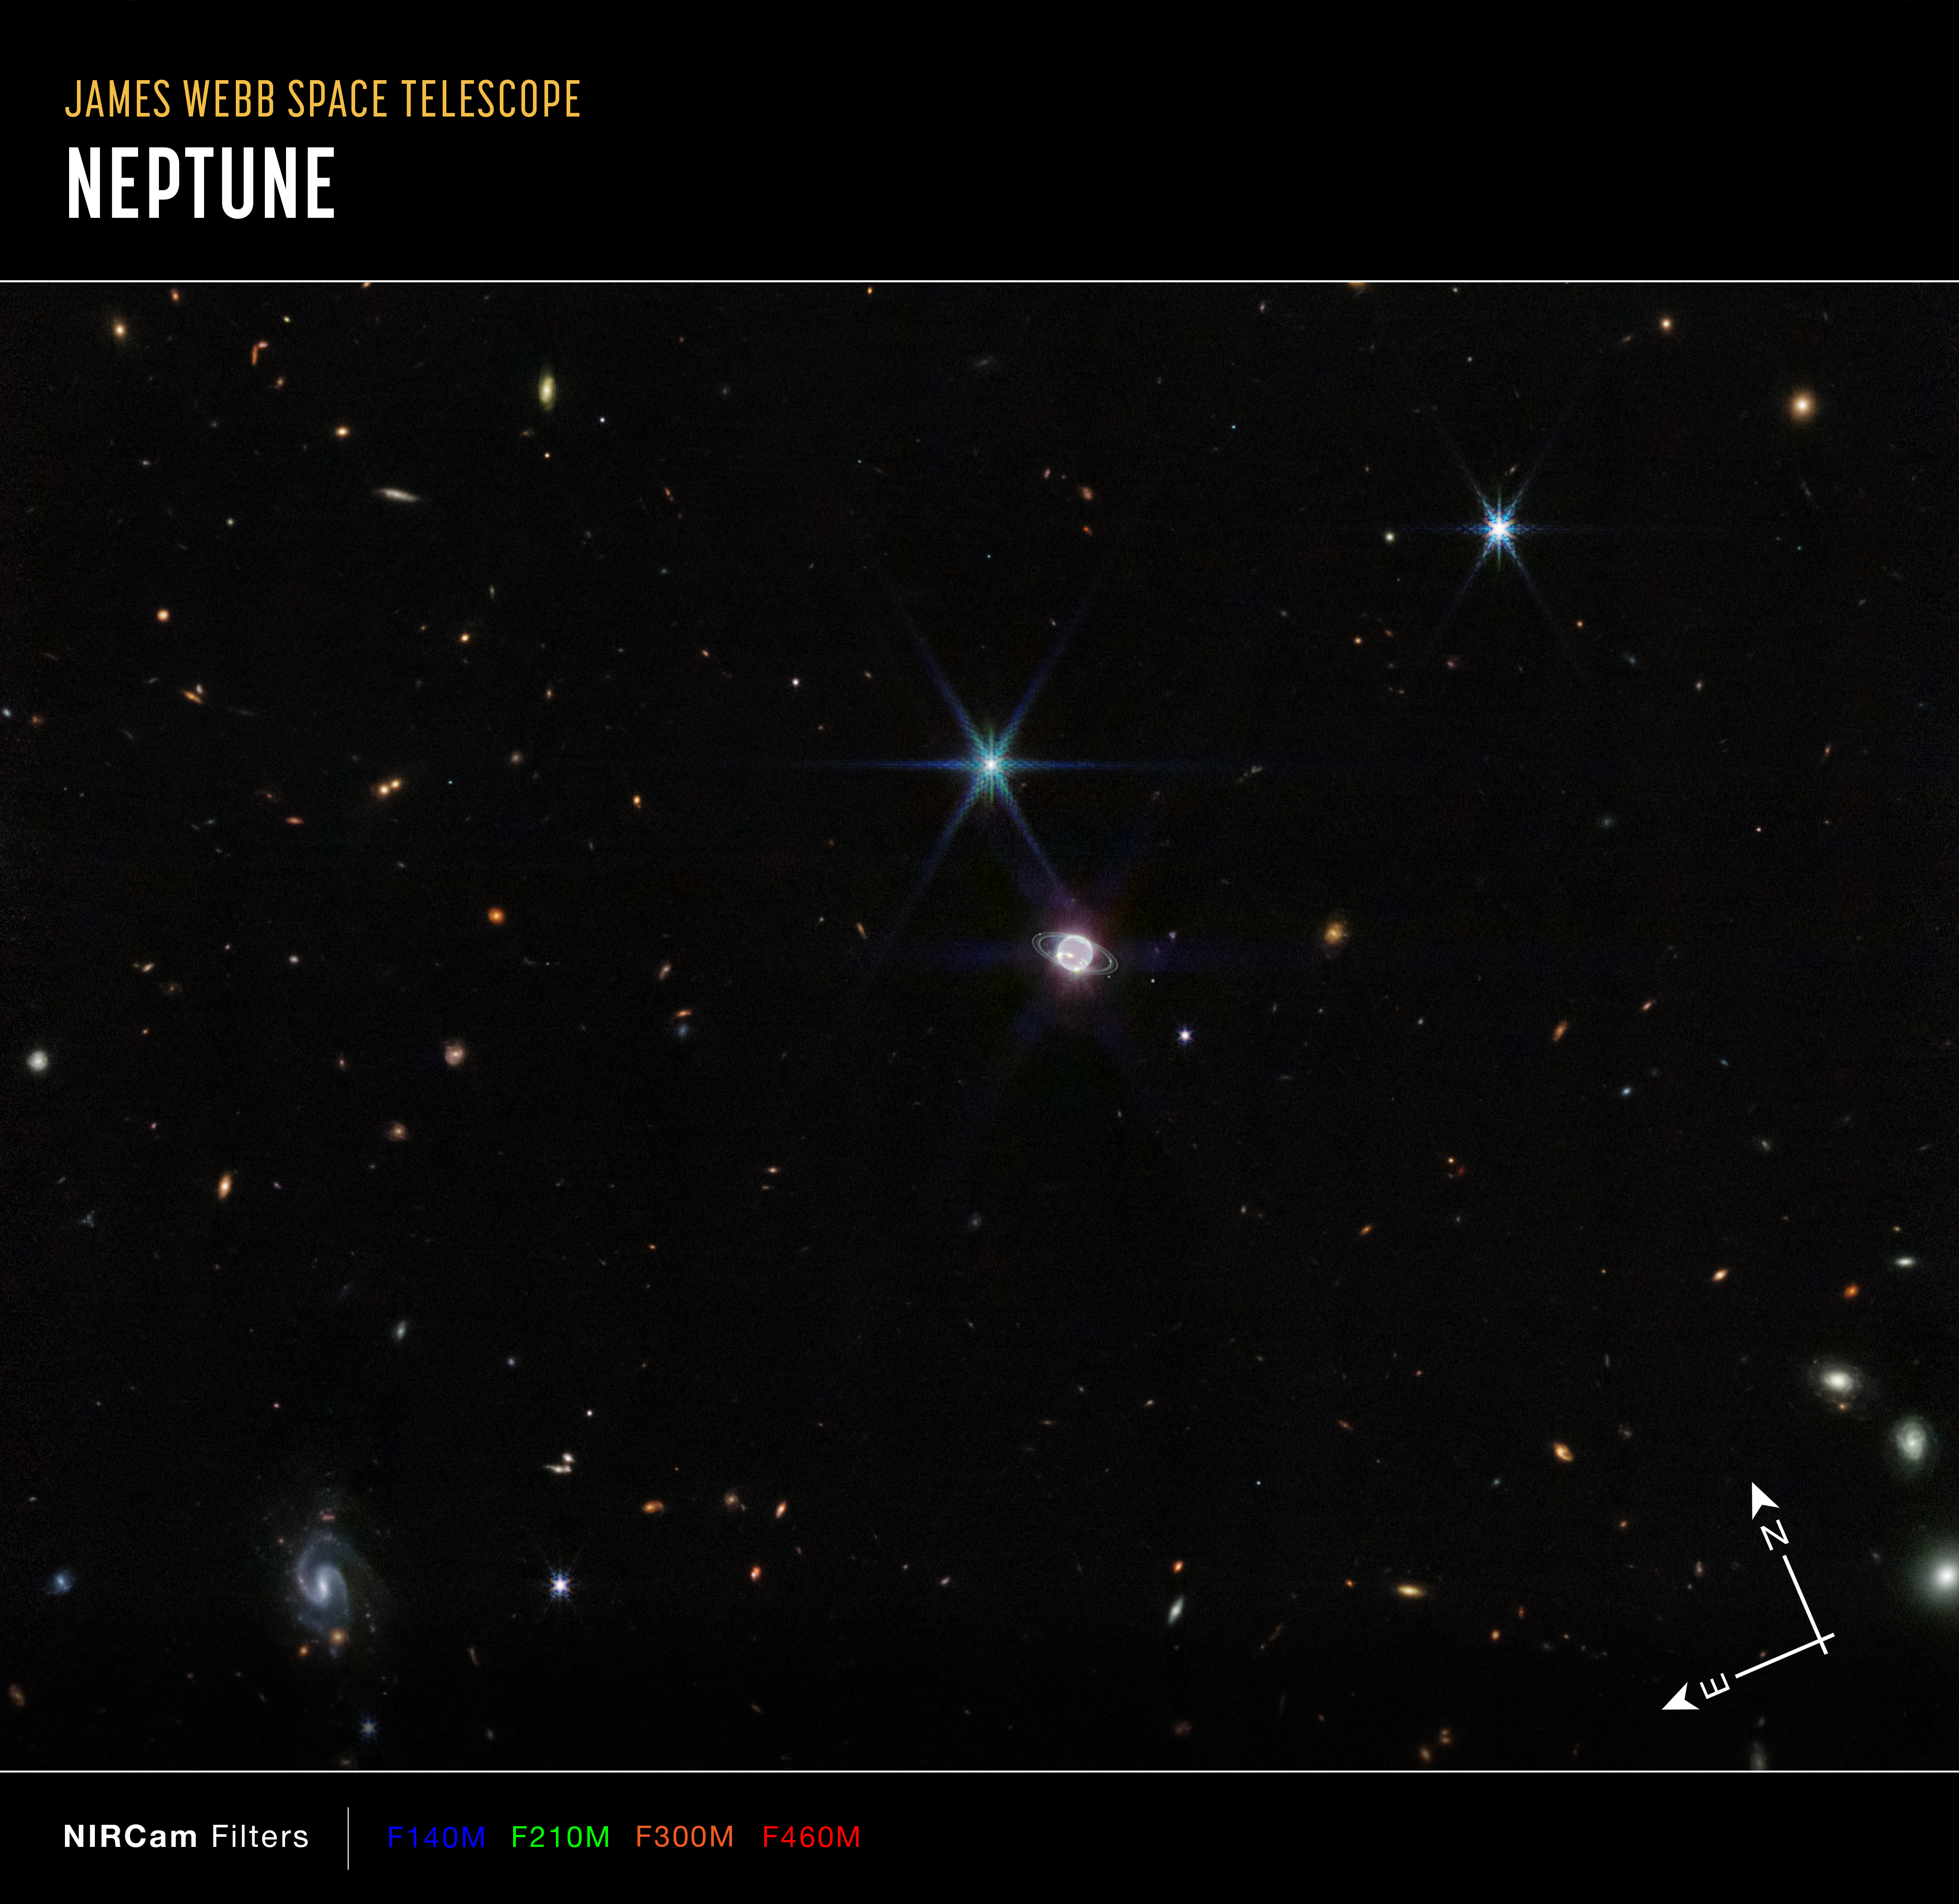

Neptune Wide-Field (NIRCam Image Annotated)

In this image by Webb’s Near-Infrared Camera (NIRCam), a smattering of hundreds of background galaxies, varying in size and shape, appear alongside the Neptune system.

Neptune, when compared to Earth, is a big planet. If Earth were the size of a nickel, Neptune would be as big as a basketball. In most portraits, the outer planets of our solar system reflect this otherworldly size. However, Neptune appears relatively small in a wide field of the vast universe.

Towards the bottom left of this image, a barred spiral galaxy comes into focus. Scientists say this particular galaxy, previously unexplored in detail, is about 1,200 million light years away. These types of galaxies at this relative difference are typically dominated by young stars that appear blueish in these wavelengths.

Credit: NASA, ESA, CSA, and STScI